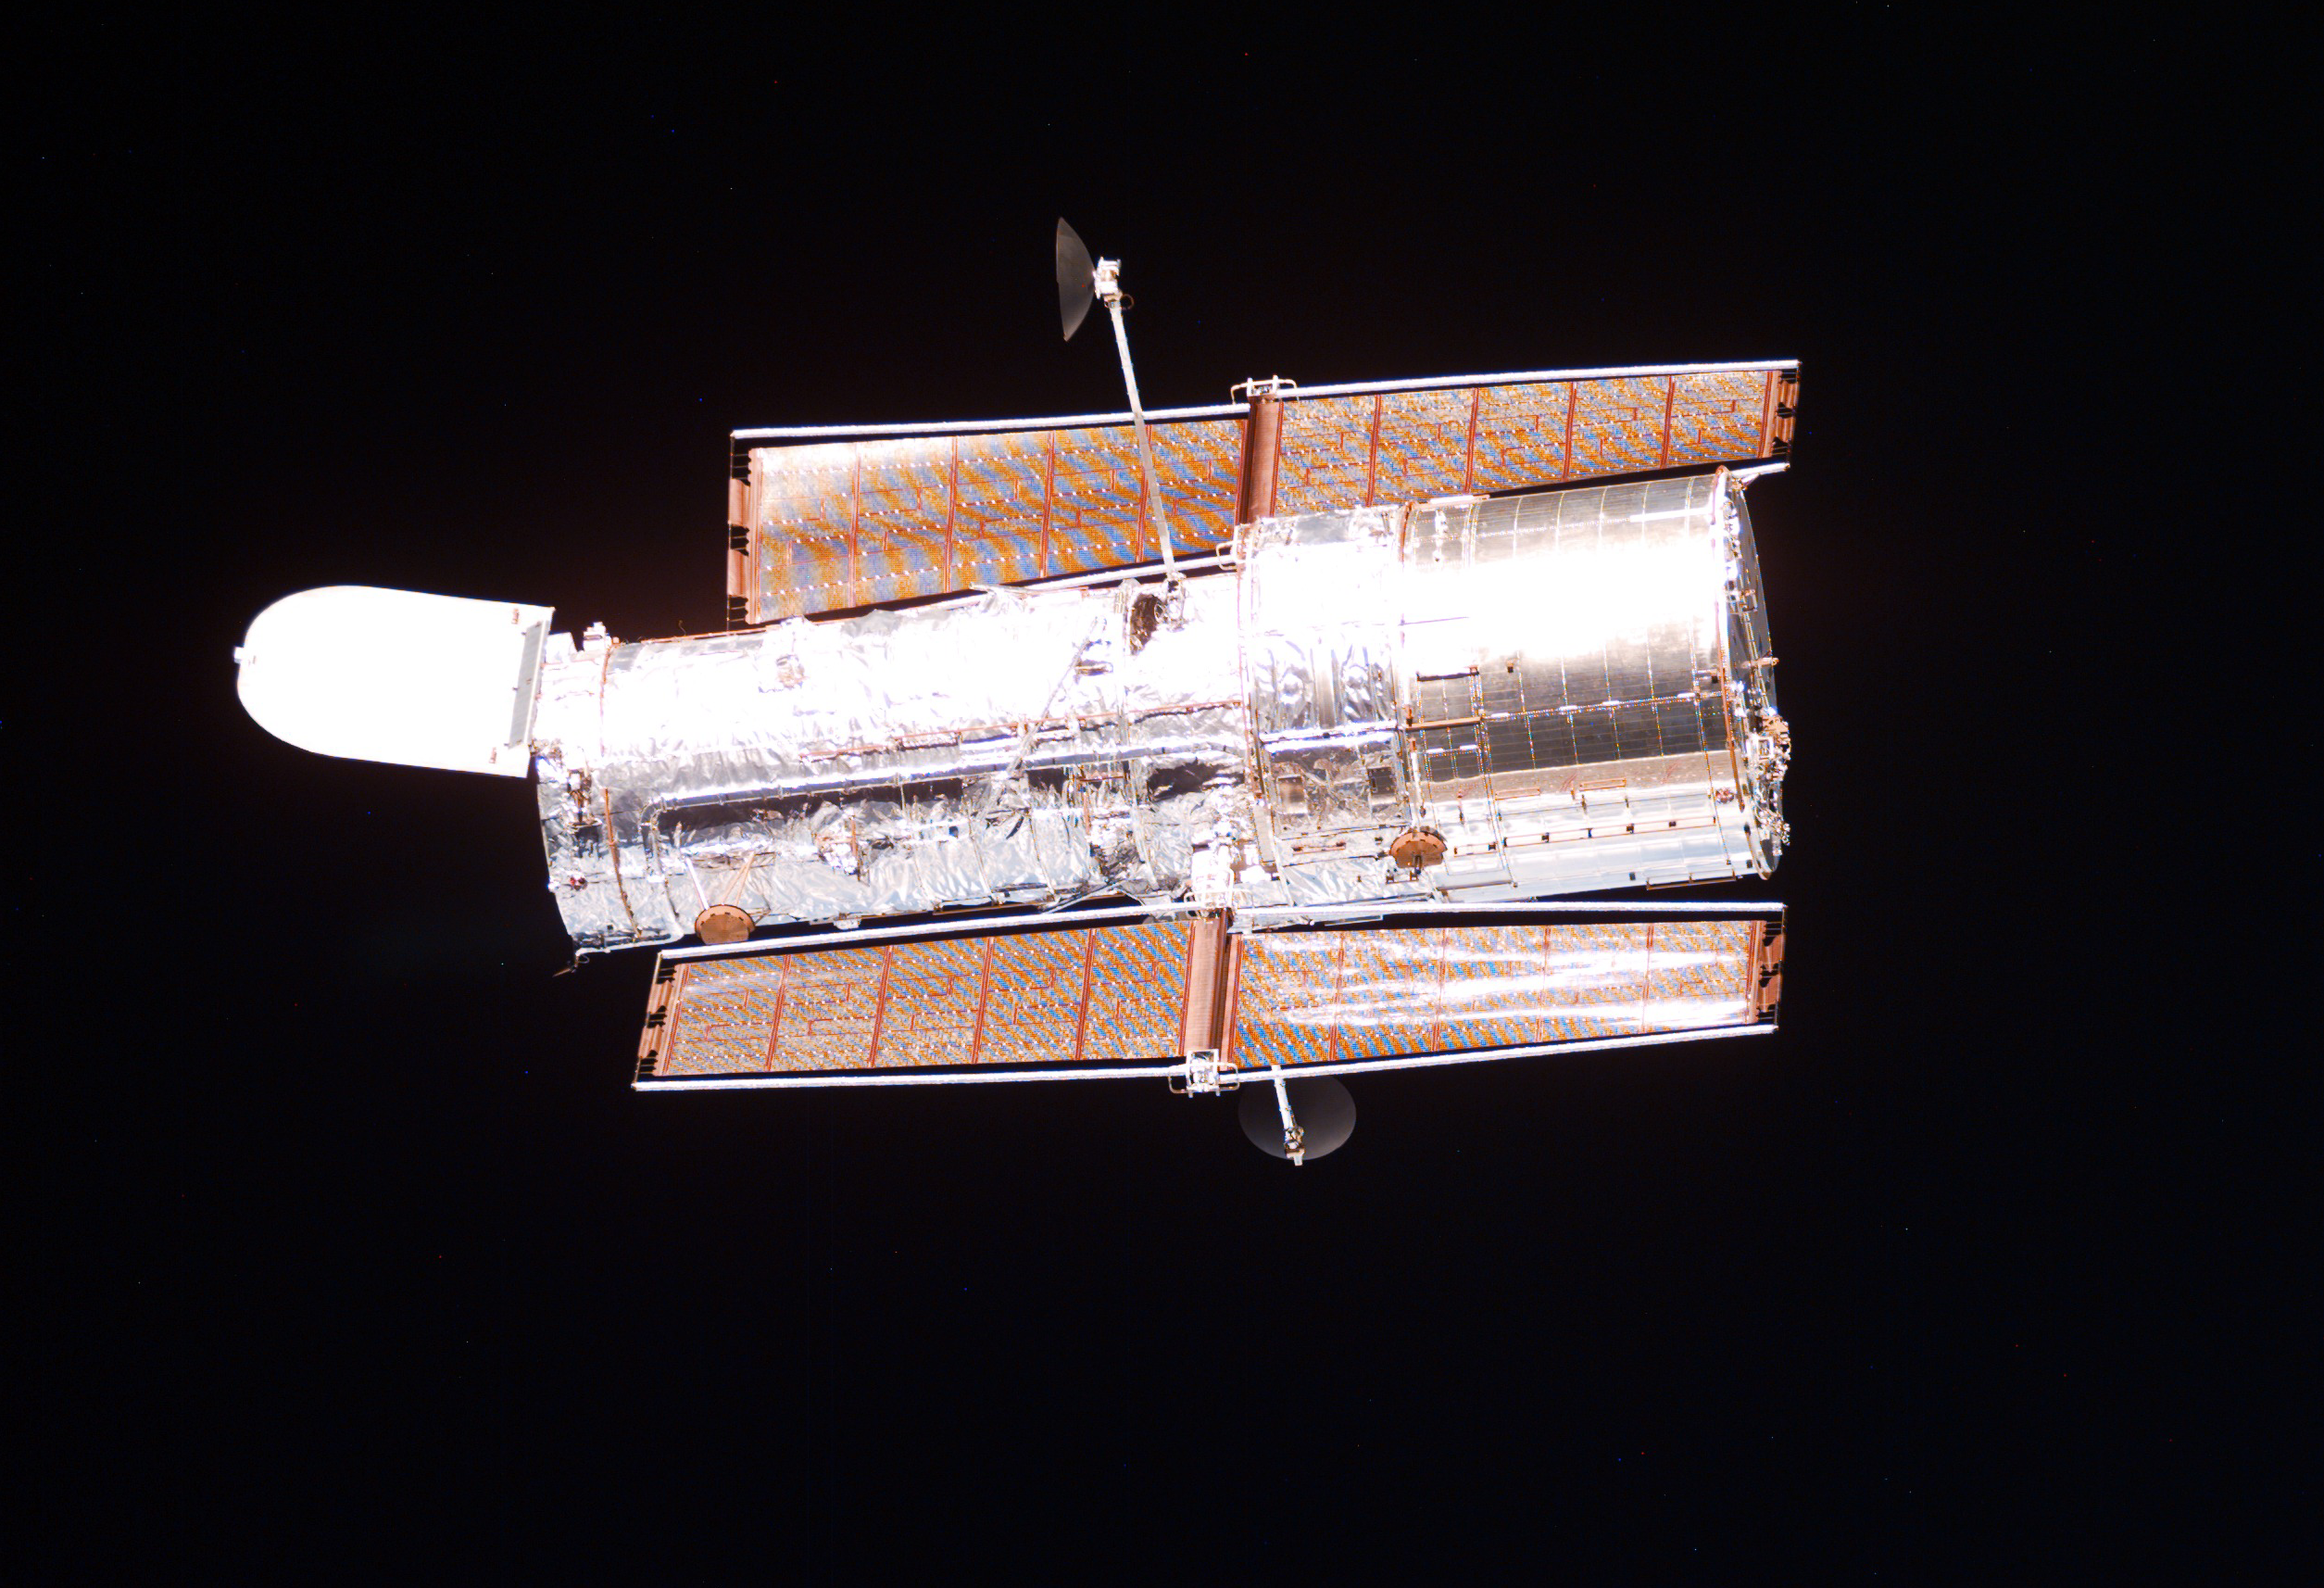

SM3A: Close-Up View of Hubble

This is a close-up view of the Hubble Space Telescope (HST).

Credit: NASA/ESA